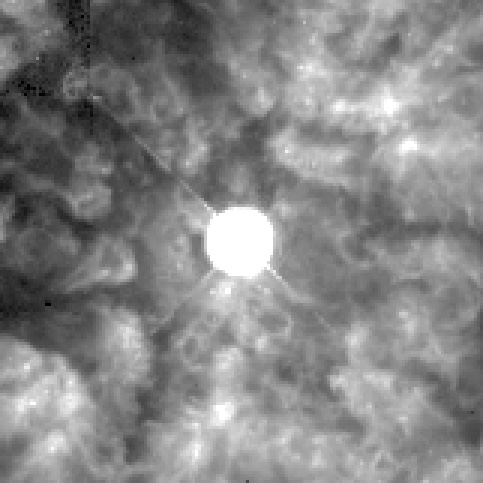

Great Balls of Fire! Hubble Sees Bright Knots Ejected from Brilliant Star

The massive, hot central star is known as a Wolf-Rayet star. This extremely rare and short-lived class of super-hot star is going through a violent, transitional phase characterized by the fierce ejection of mass. The blobs may result from the furious stellar wind that does not flow smoothly into space but has instabilities which make it clumpy. This black and white image was made in the light of atomic hydrogen. The contrast has been increased to emphasize the fine detail in the nebula near the central star.

Credit: Yves Grosdidier (University of Montreal and Observatoire de Strasbourg), Anthony Moffat (Universitie de Montreal), Gilles Joncas(Universite Laval), Agnes Acker (Observatoire de Strasbourg), and NASA/ESA